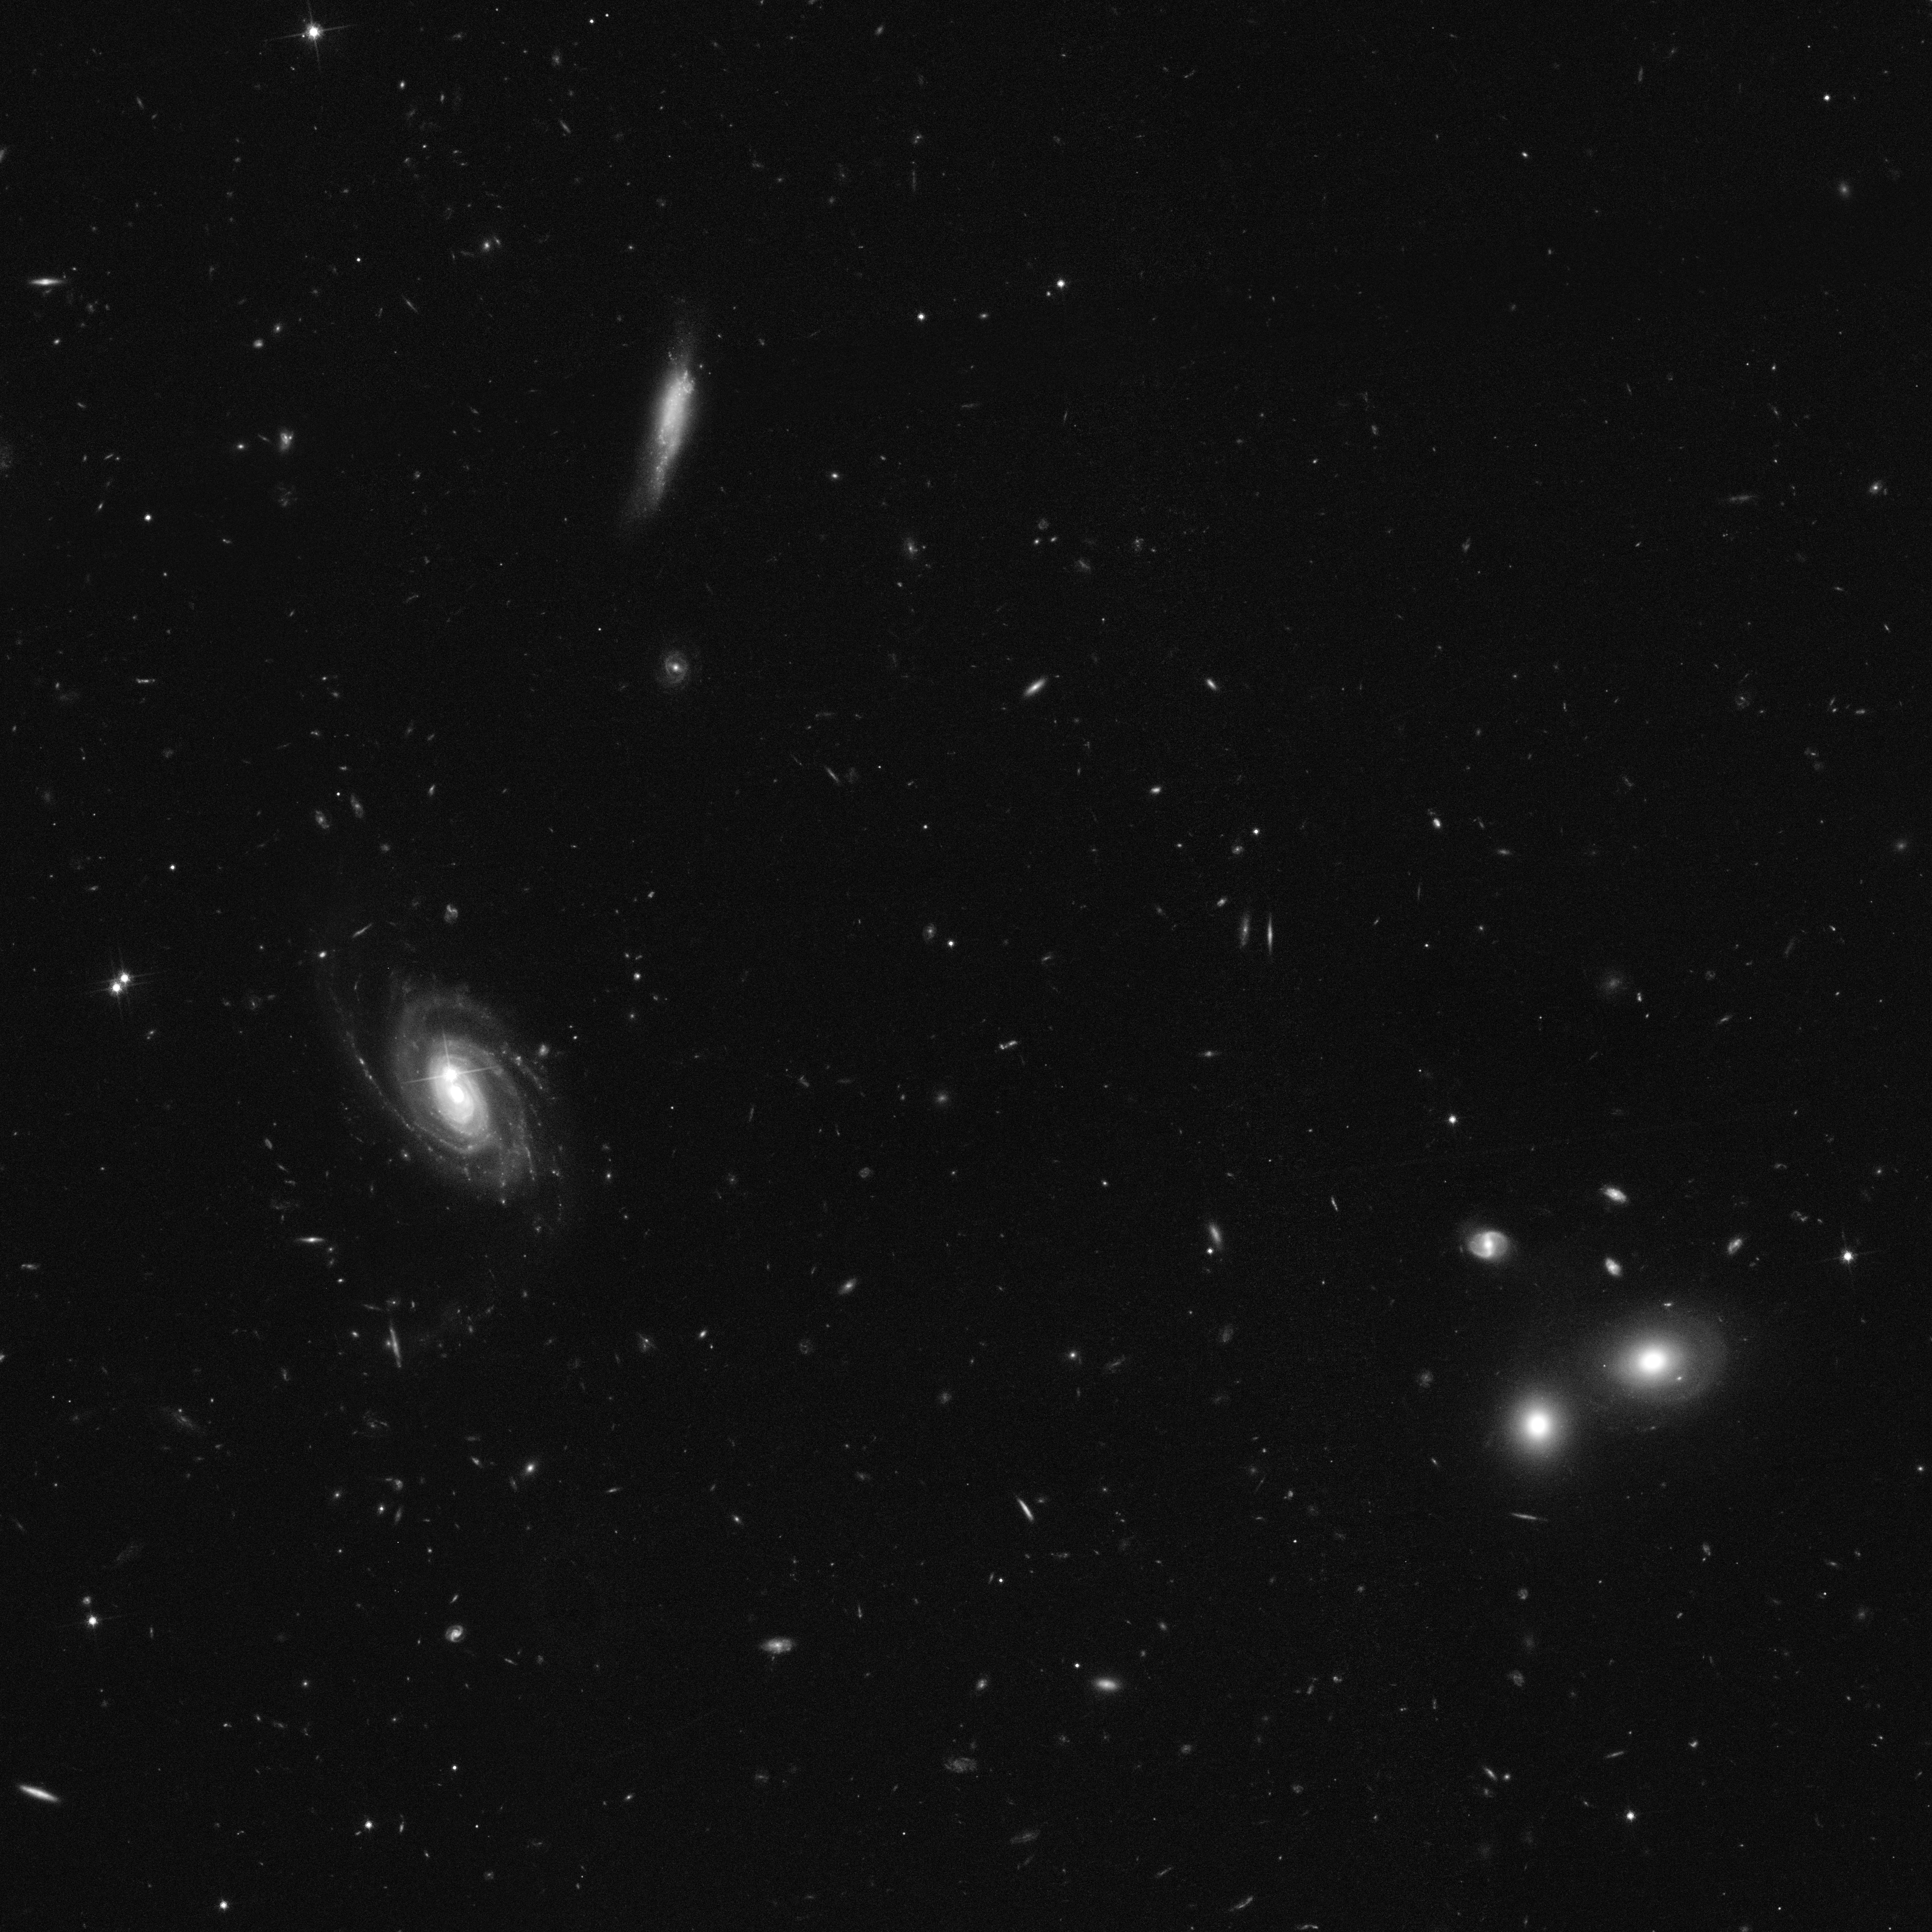

Excerpt of the COSMOS survey in full resolution

This image shows an excerpt of the COSMOS survey in full resolution. COSMOS - the Cosmic Evolution Survey - is the Hubble Space Telescope's largest ever survey of the Universe and was carried out by an international team of 70 astronomers. In making the COSMOS survey, Hubble photographed 575 adjacent and slightly overlapping views of the universe using the Advanced Camera for Surveys' (ACS) Wide Field Camera onboard Hubble. It took nearly 1,000 hours of observations. The distances to the galaxies were determined from their spectral redshifts, using ESO's Very Large Telescope, the Subaru and CFHT telescopes in Hawaii and the Magellan telescope in Chile.

The full COSMOS image in full resolution would be 100,800 x 100,800 pixels. The image was taken in hear-infrared light (Hubble's F814W, or I-band, filter).

Credit: NASA, ESA and A. Koekemoer (STScI)